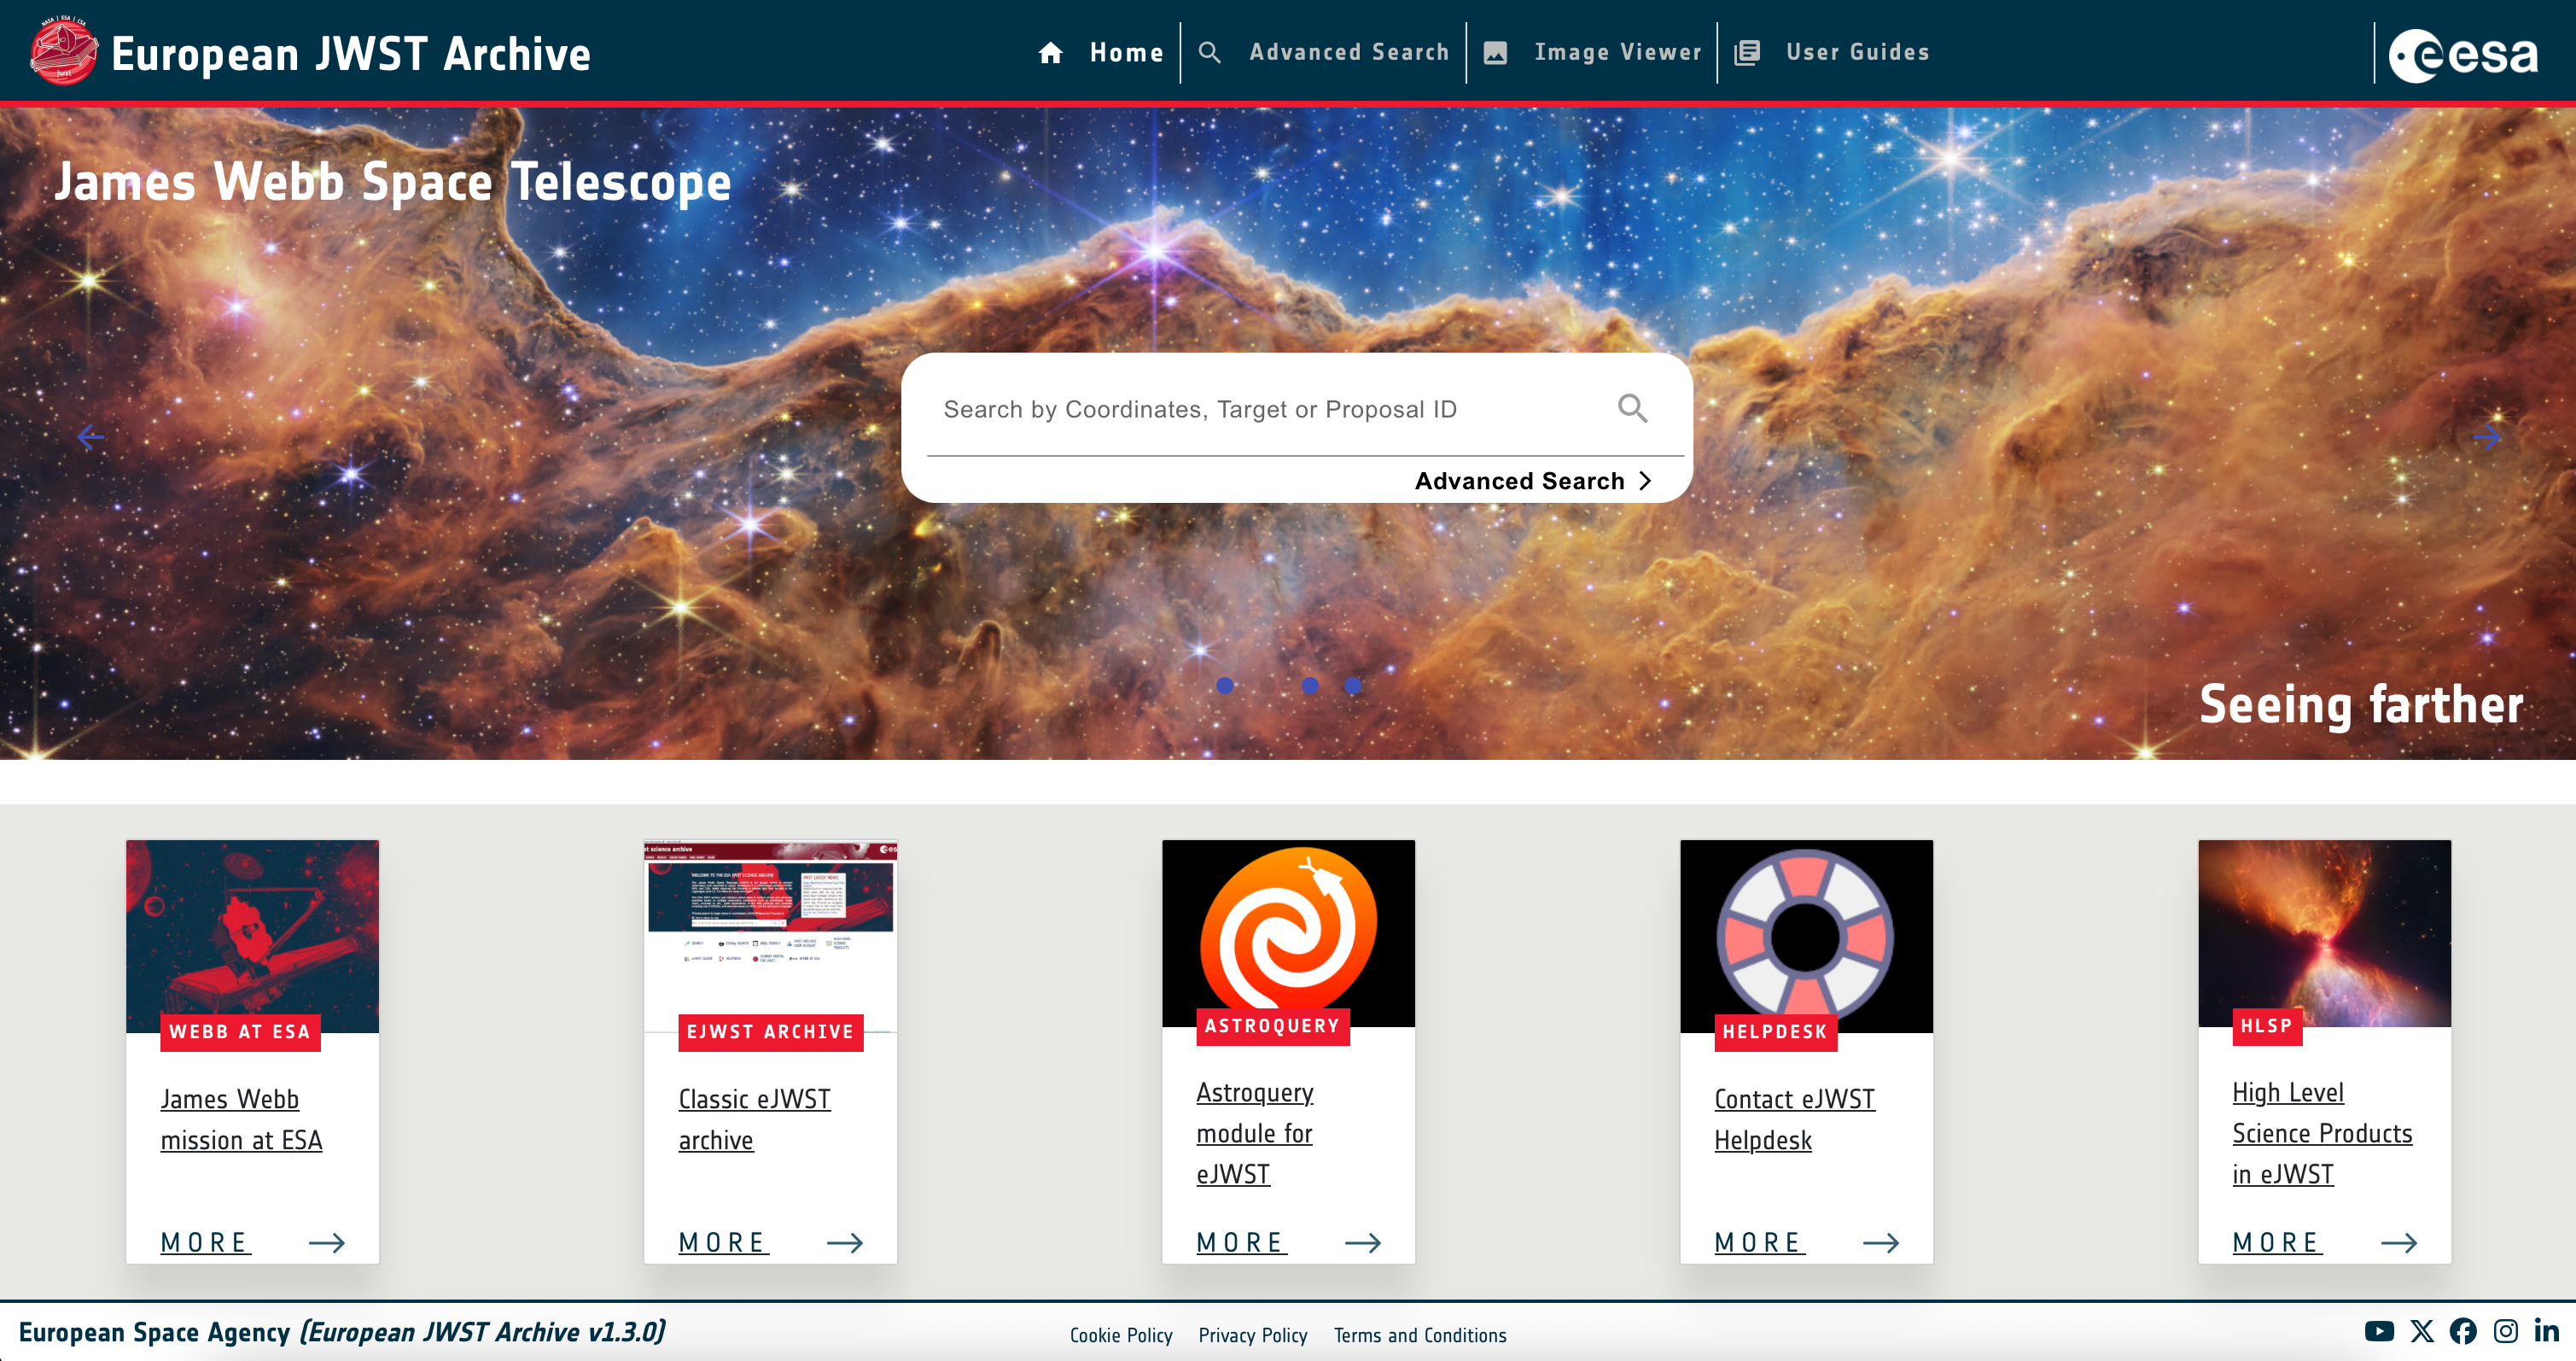

New eJWST User Interface

This image shows the new eJWST user interface.

Credit: eJWST